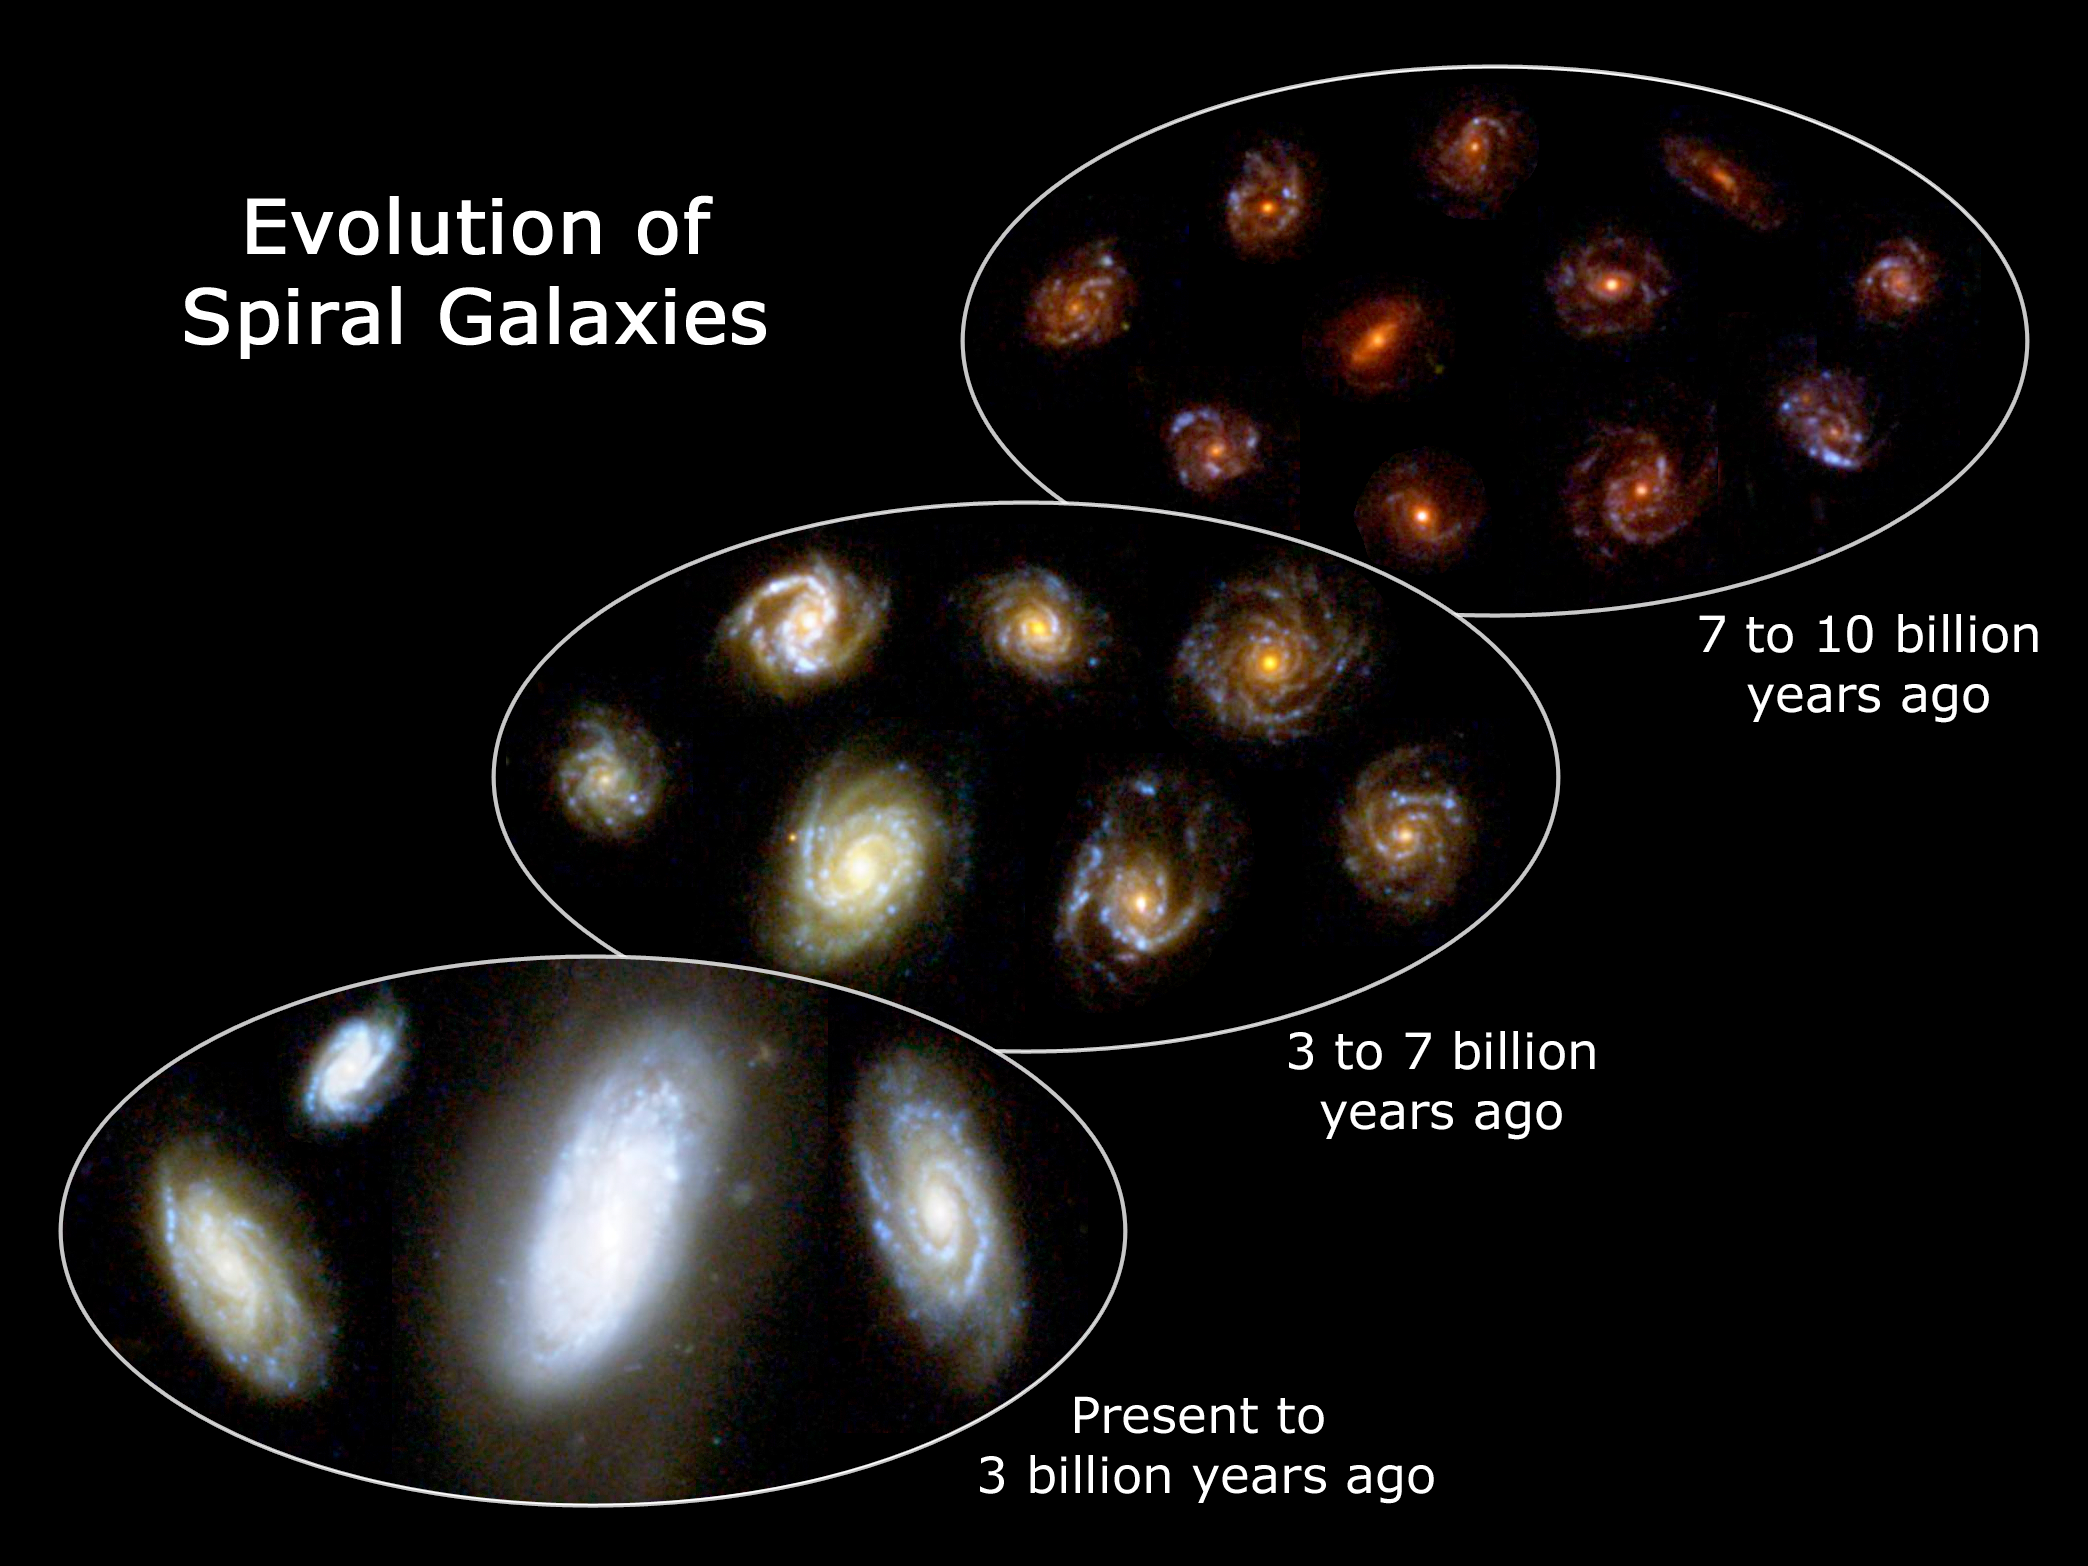

Evolution of spiral galaxies

This image shows the evolution of spiral galaxies, from fully formed structures to disheveled collections of stars just beginning to form. These galaxies were captured in the Great Observatories Origins Deep Survey and are presented in the IMAX short film "Hubble: Galaxies Across Space and Time." It takes billions of years for the light of a distant galaxy to reach Earth. Consequently, we see such galaxies as they were in the past, and can thus assemble a rough pictorial history of galaxy evolution.

Credit: NASA, ESA, F. Summers and Z. Levay (STScI)